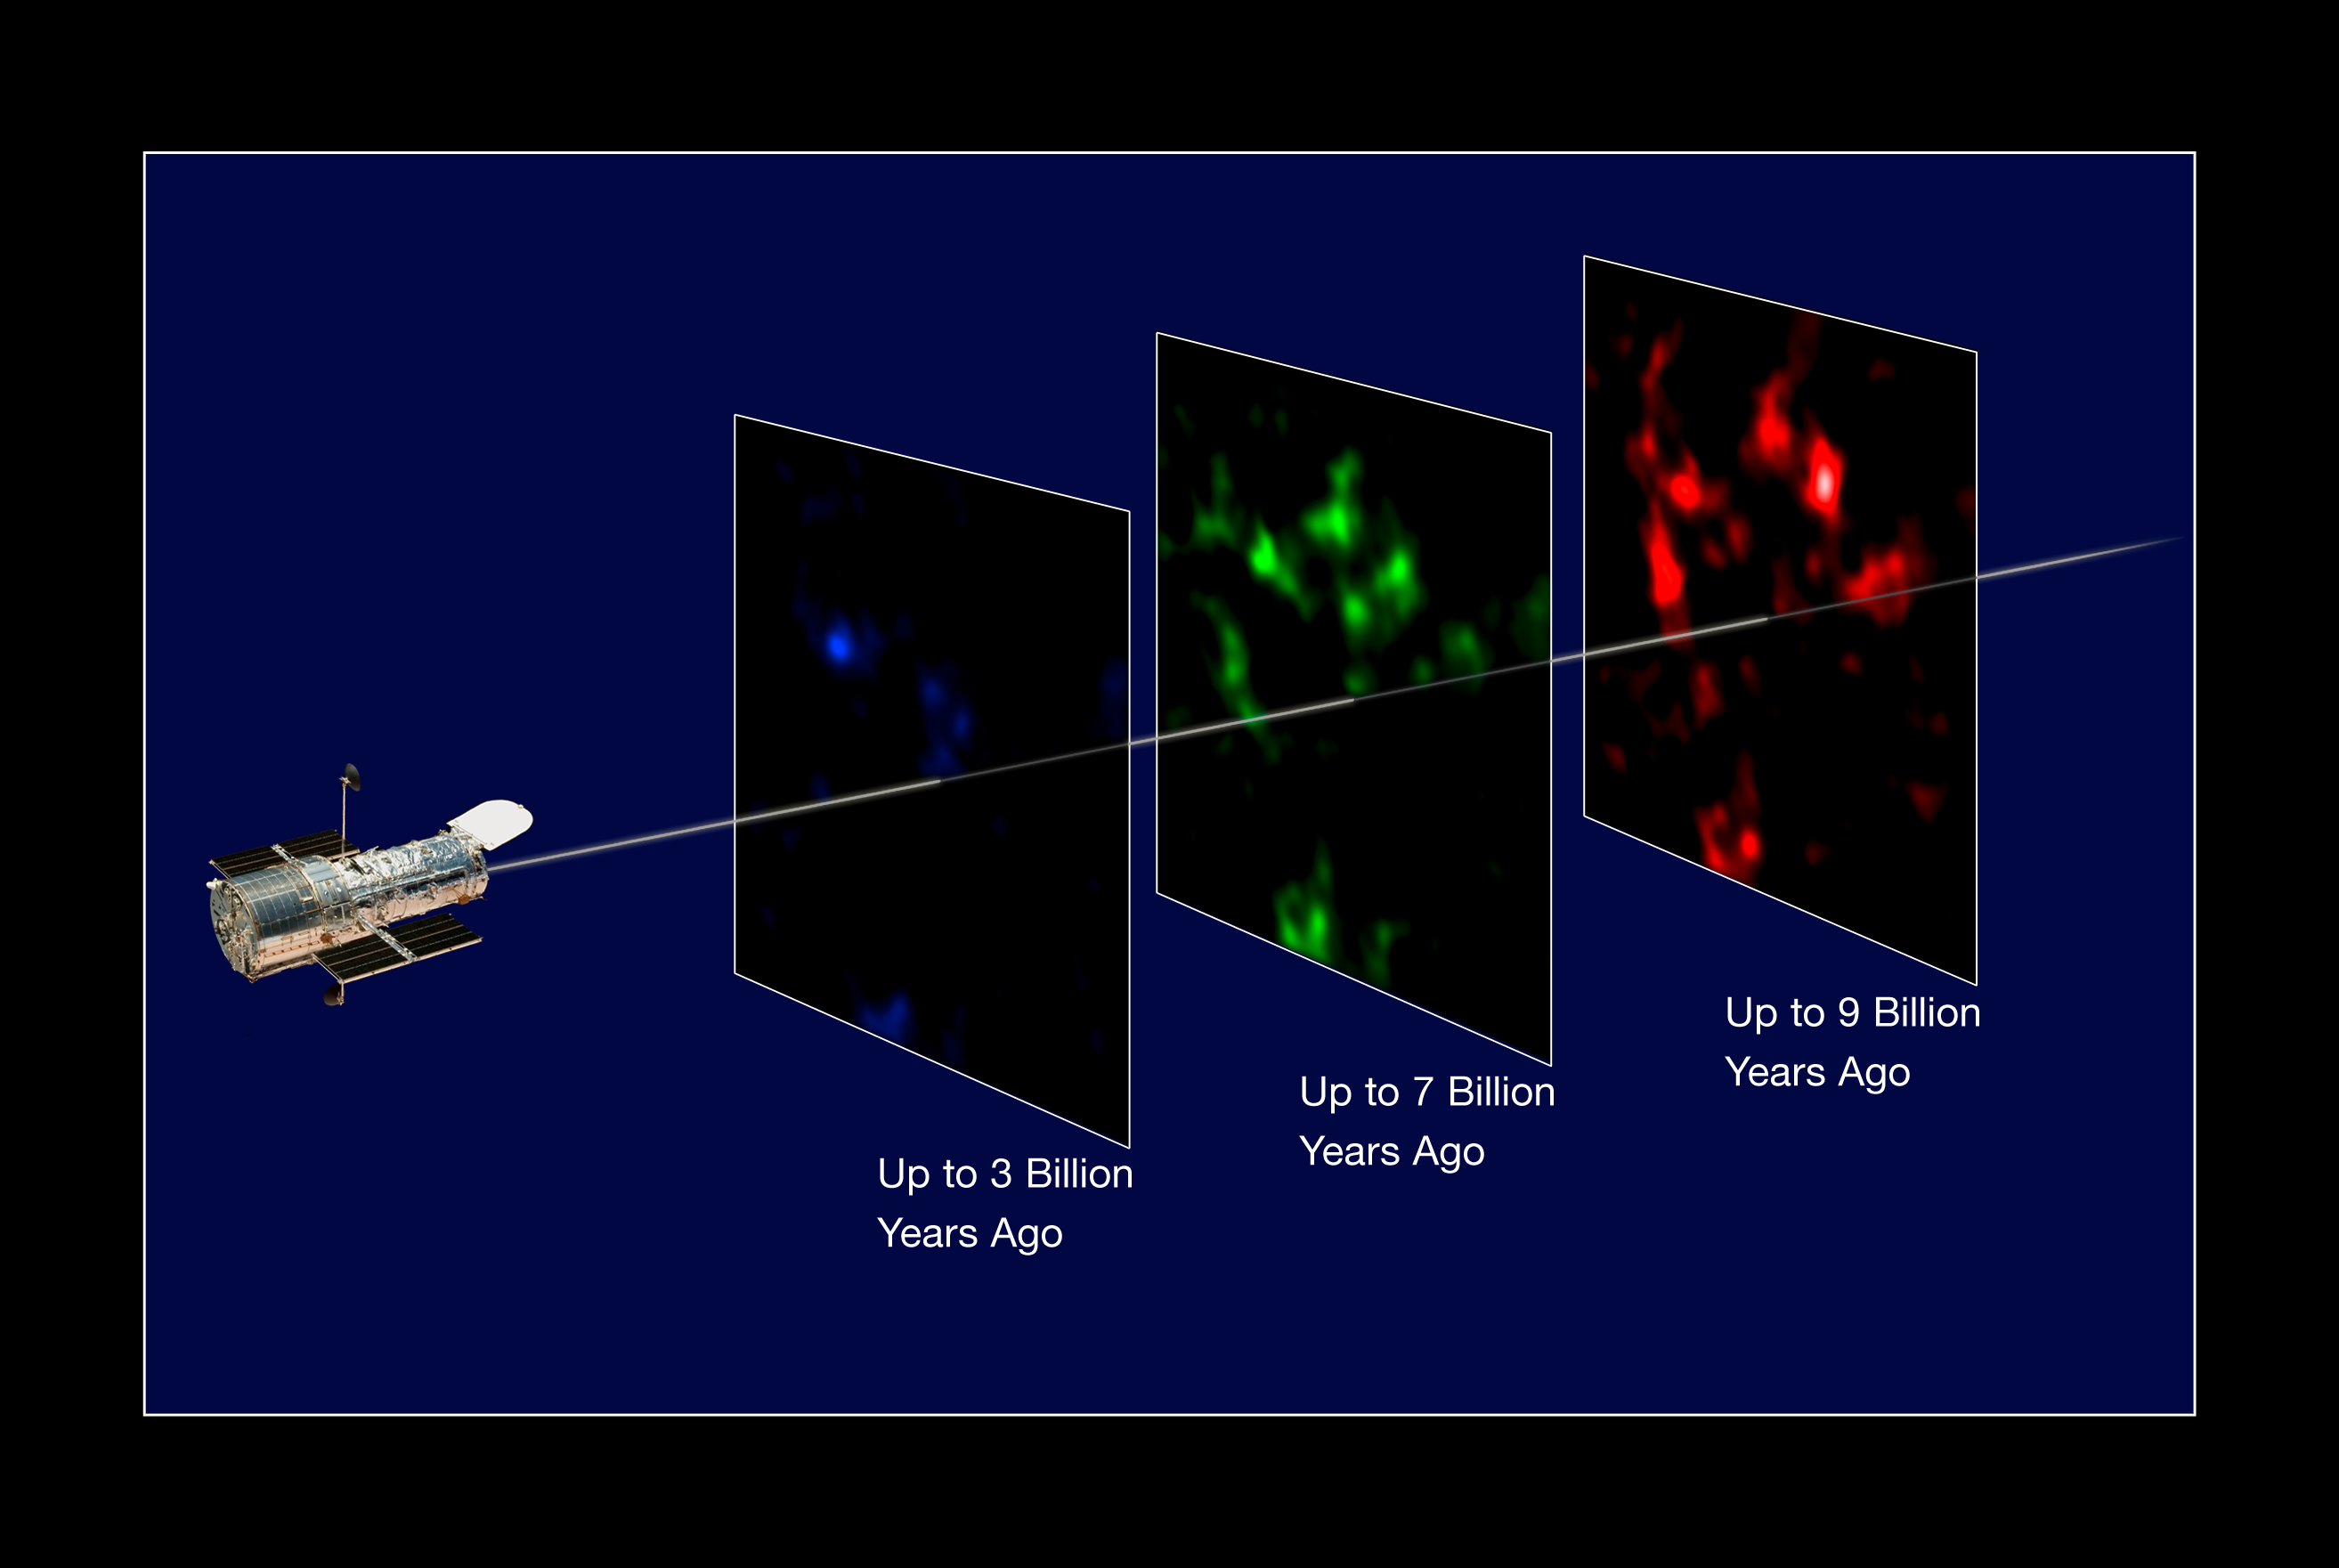

Distribution of dark matter in the Universe

In this illustration the NASA/ESA Hubble Space Telescope looks back in time to "map" evolving dark matter. The dataset is created by splitting the background source galaxy population into discrete epochs of time (like cutting through geological strata), looking back into the past. This is calibrated by measuring the cosmological redshift of the lensing galaxies used to map the dark matter distribution, and putting them into different time/distance "slices".

Background galaxies are lensed, or distorted, by all structures in their foreground. Thus, the more distant background galaxies are selected, the more structures can be detected. Here the respective strengths of the lensing effect depend on the distances involved.

The projected mass distributions inferred from the low, intermediate, and high redshift galaxies are shown in blue, green and red, respectively. Nearby structures may be detected by all subsets (as exemplified by the "blob" appearing on the top left of each panel), while very distant structures can only be detected by even more distant background galaxies, and thus appear in the red map only.

The new study presents the most comprehensive analysis of data from the COSMOS survey. These researchers have, for the first time ever, used Hubble and the natural "weak lenses" in space to characterise the accelerated expansion of the Universe.

Credit: NASA, ESA, P. Simon (University of Bonn) and T. Schrabback (Leiden Observatory)